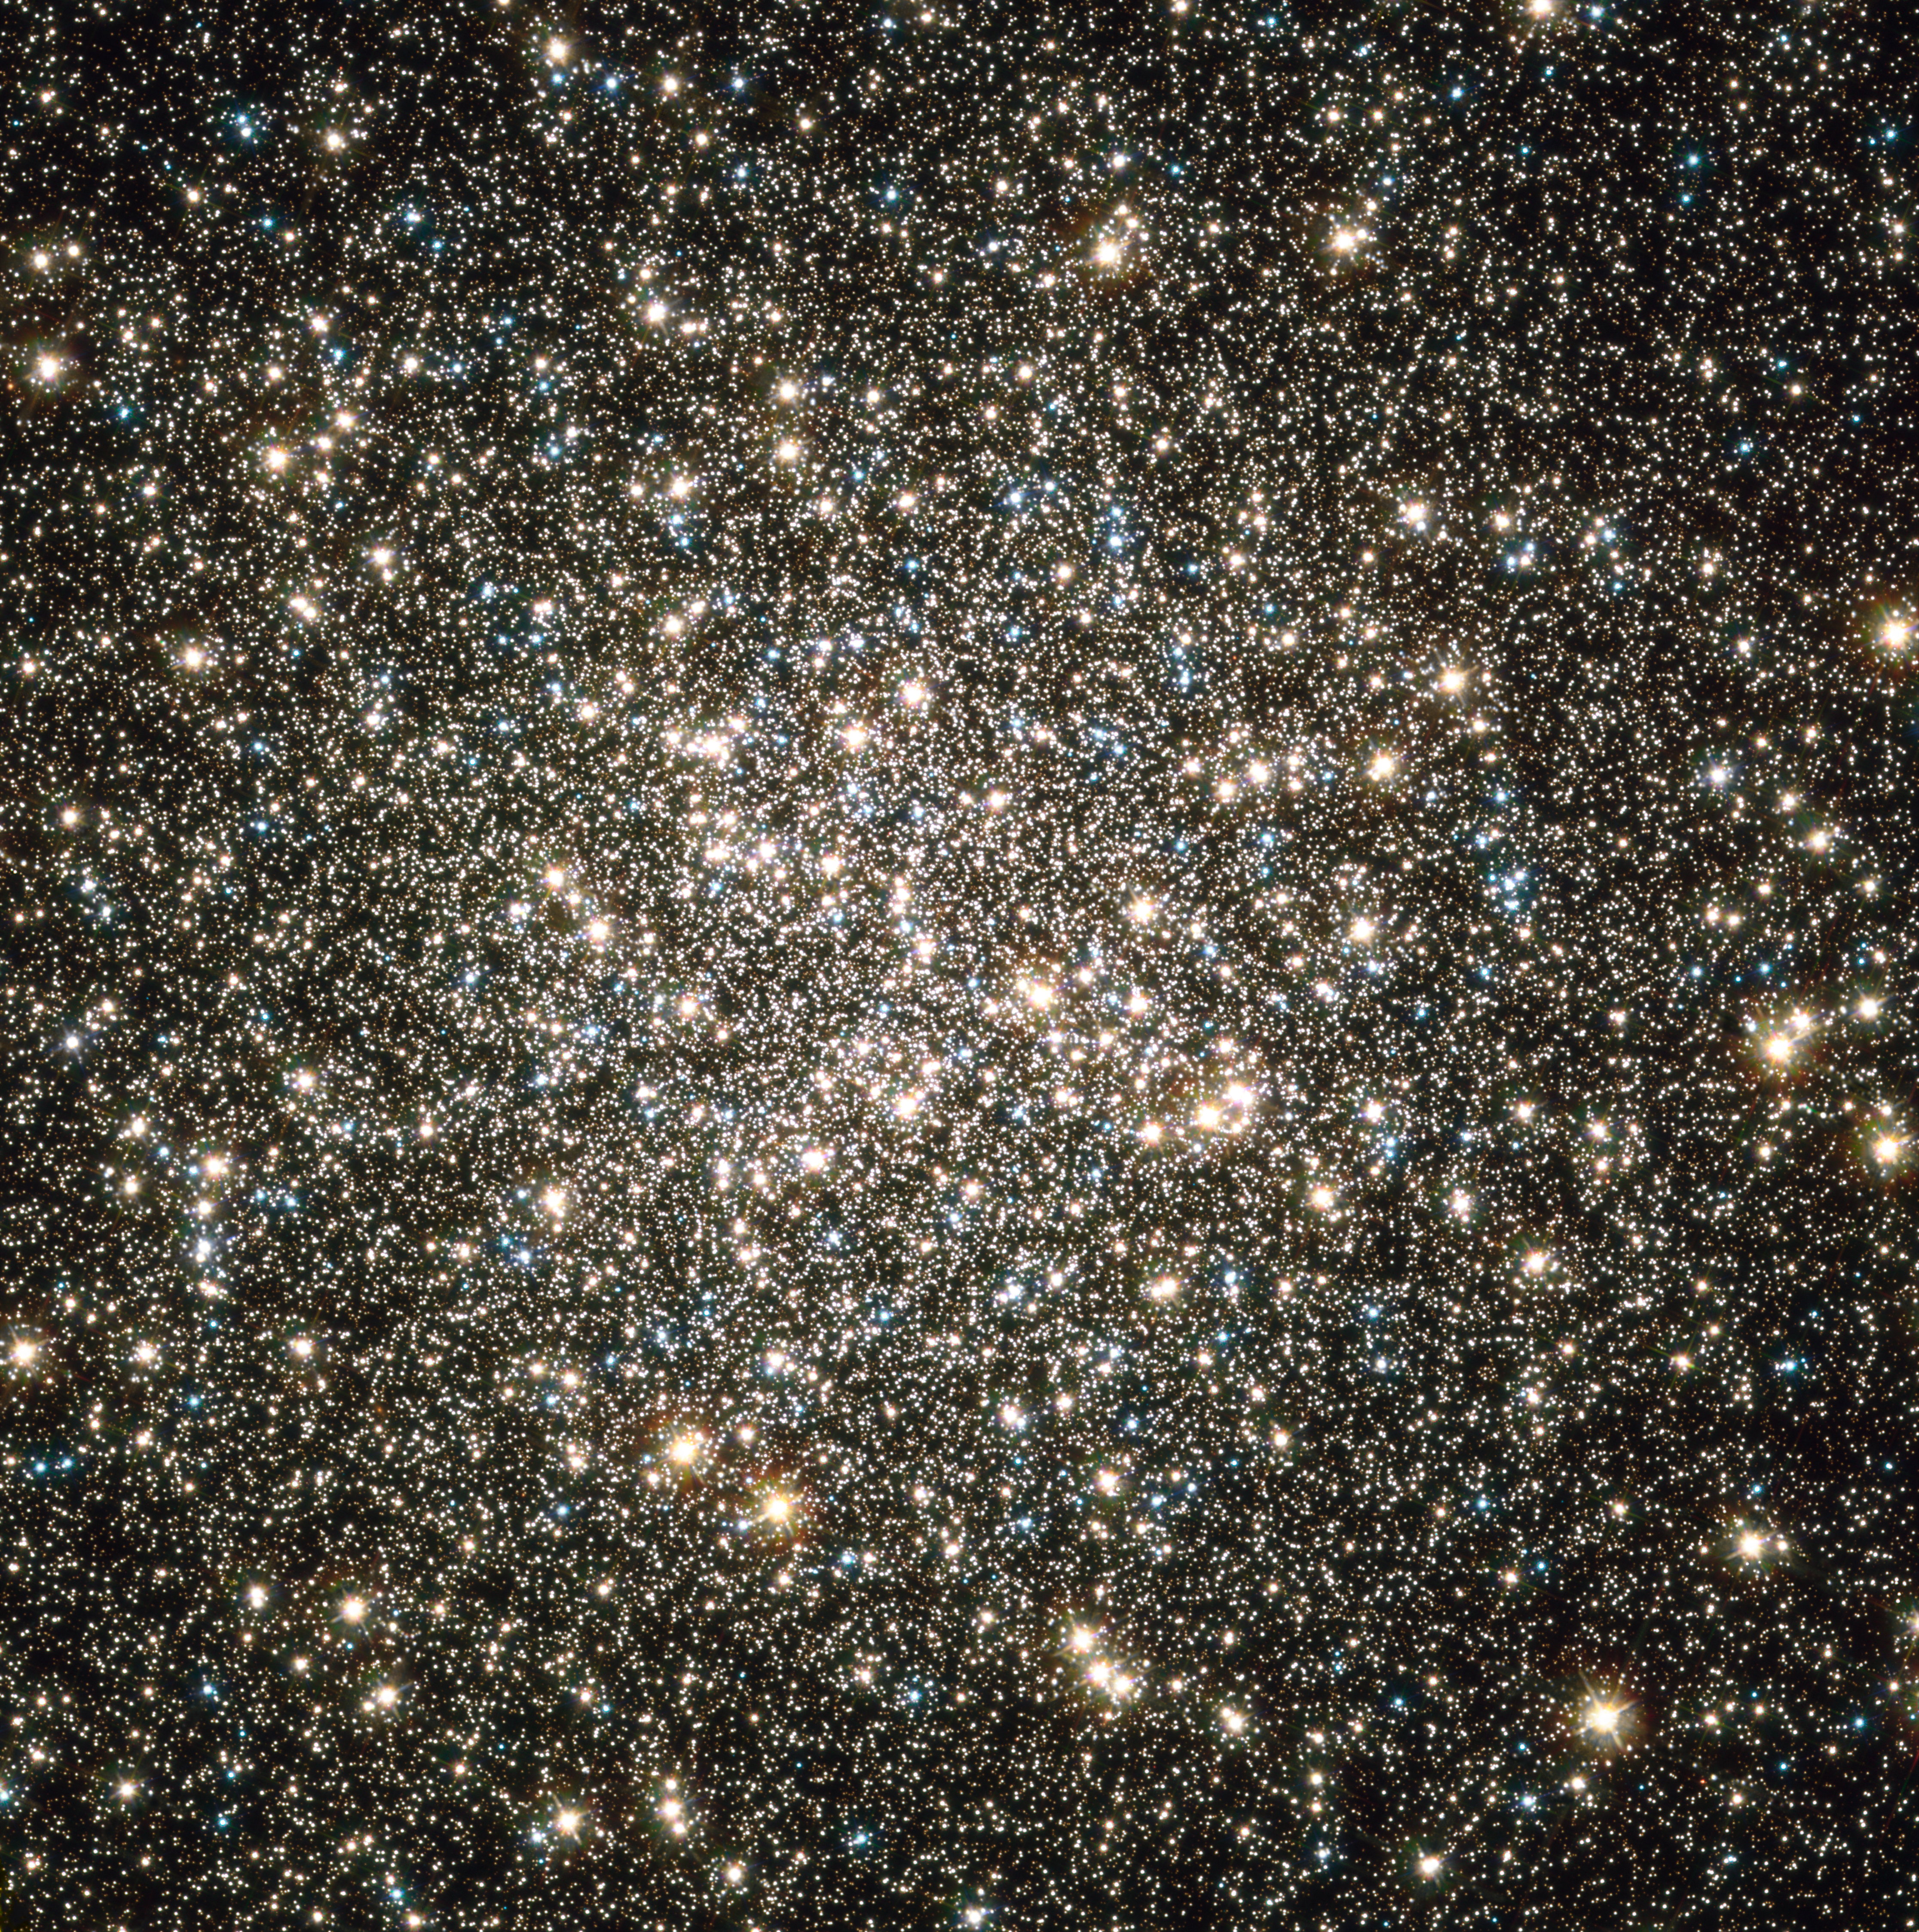

Hubble image of M13's nucleus

Hubble catches an instantaneous glimpse of many hundreds of thousands of stars moving about in the globular cluster M13, one of the brightest and best-known globular clusters in the northern sky. This glittering metropolis of stars is easily found in the winter sky in the constellation Hercules. This image is a composite of archival Hubble data taken with the Wide Field Planetary Camera 2 and the Advanced Camera for Surveys. Observations from four separate science proposals taken in November 1999, April 2000, August 2005, and April 2006 were used. The image includes broadband filters that isolate light from the blue, visible, and infrared portions of the spectrum.

Credit: NASA, ESA, and the Hubble Heritage Team (STScI/AURA)